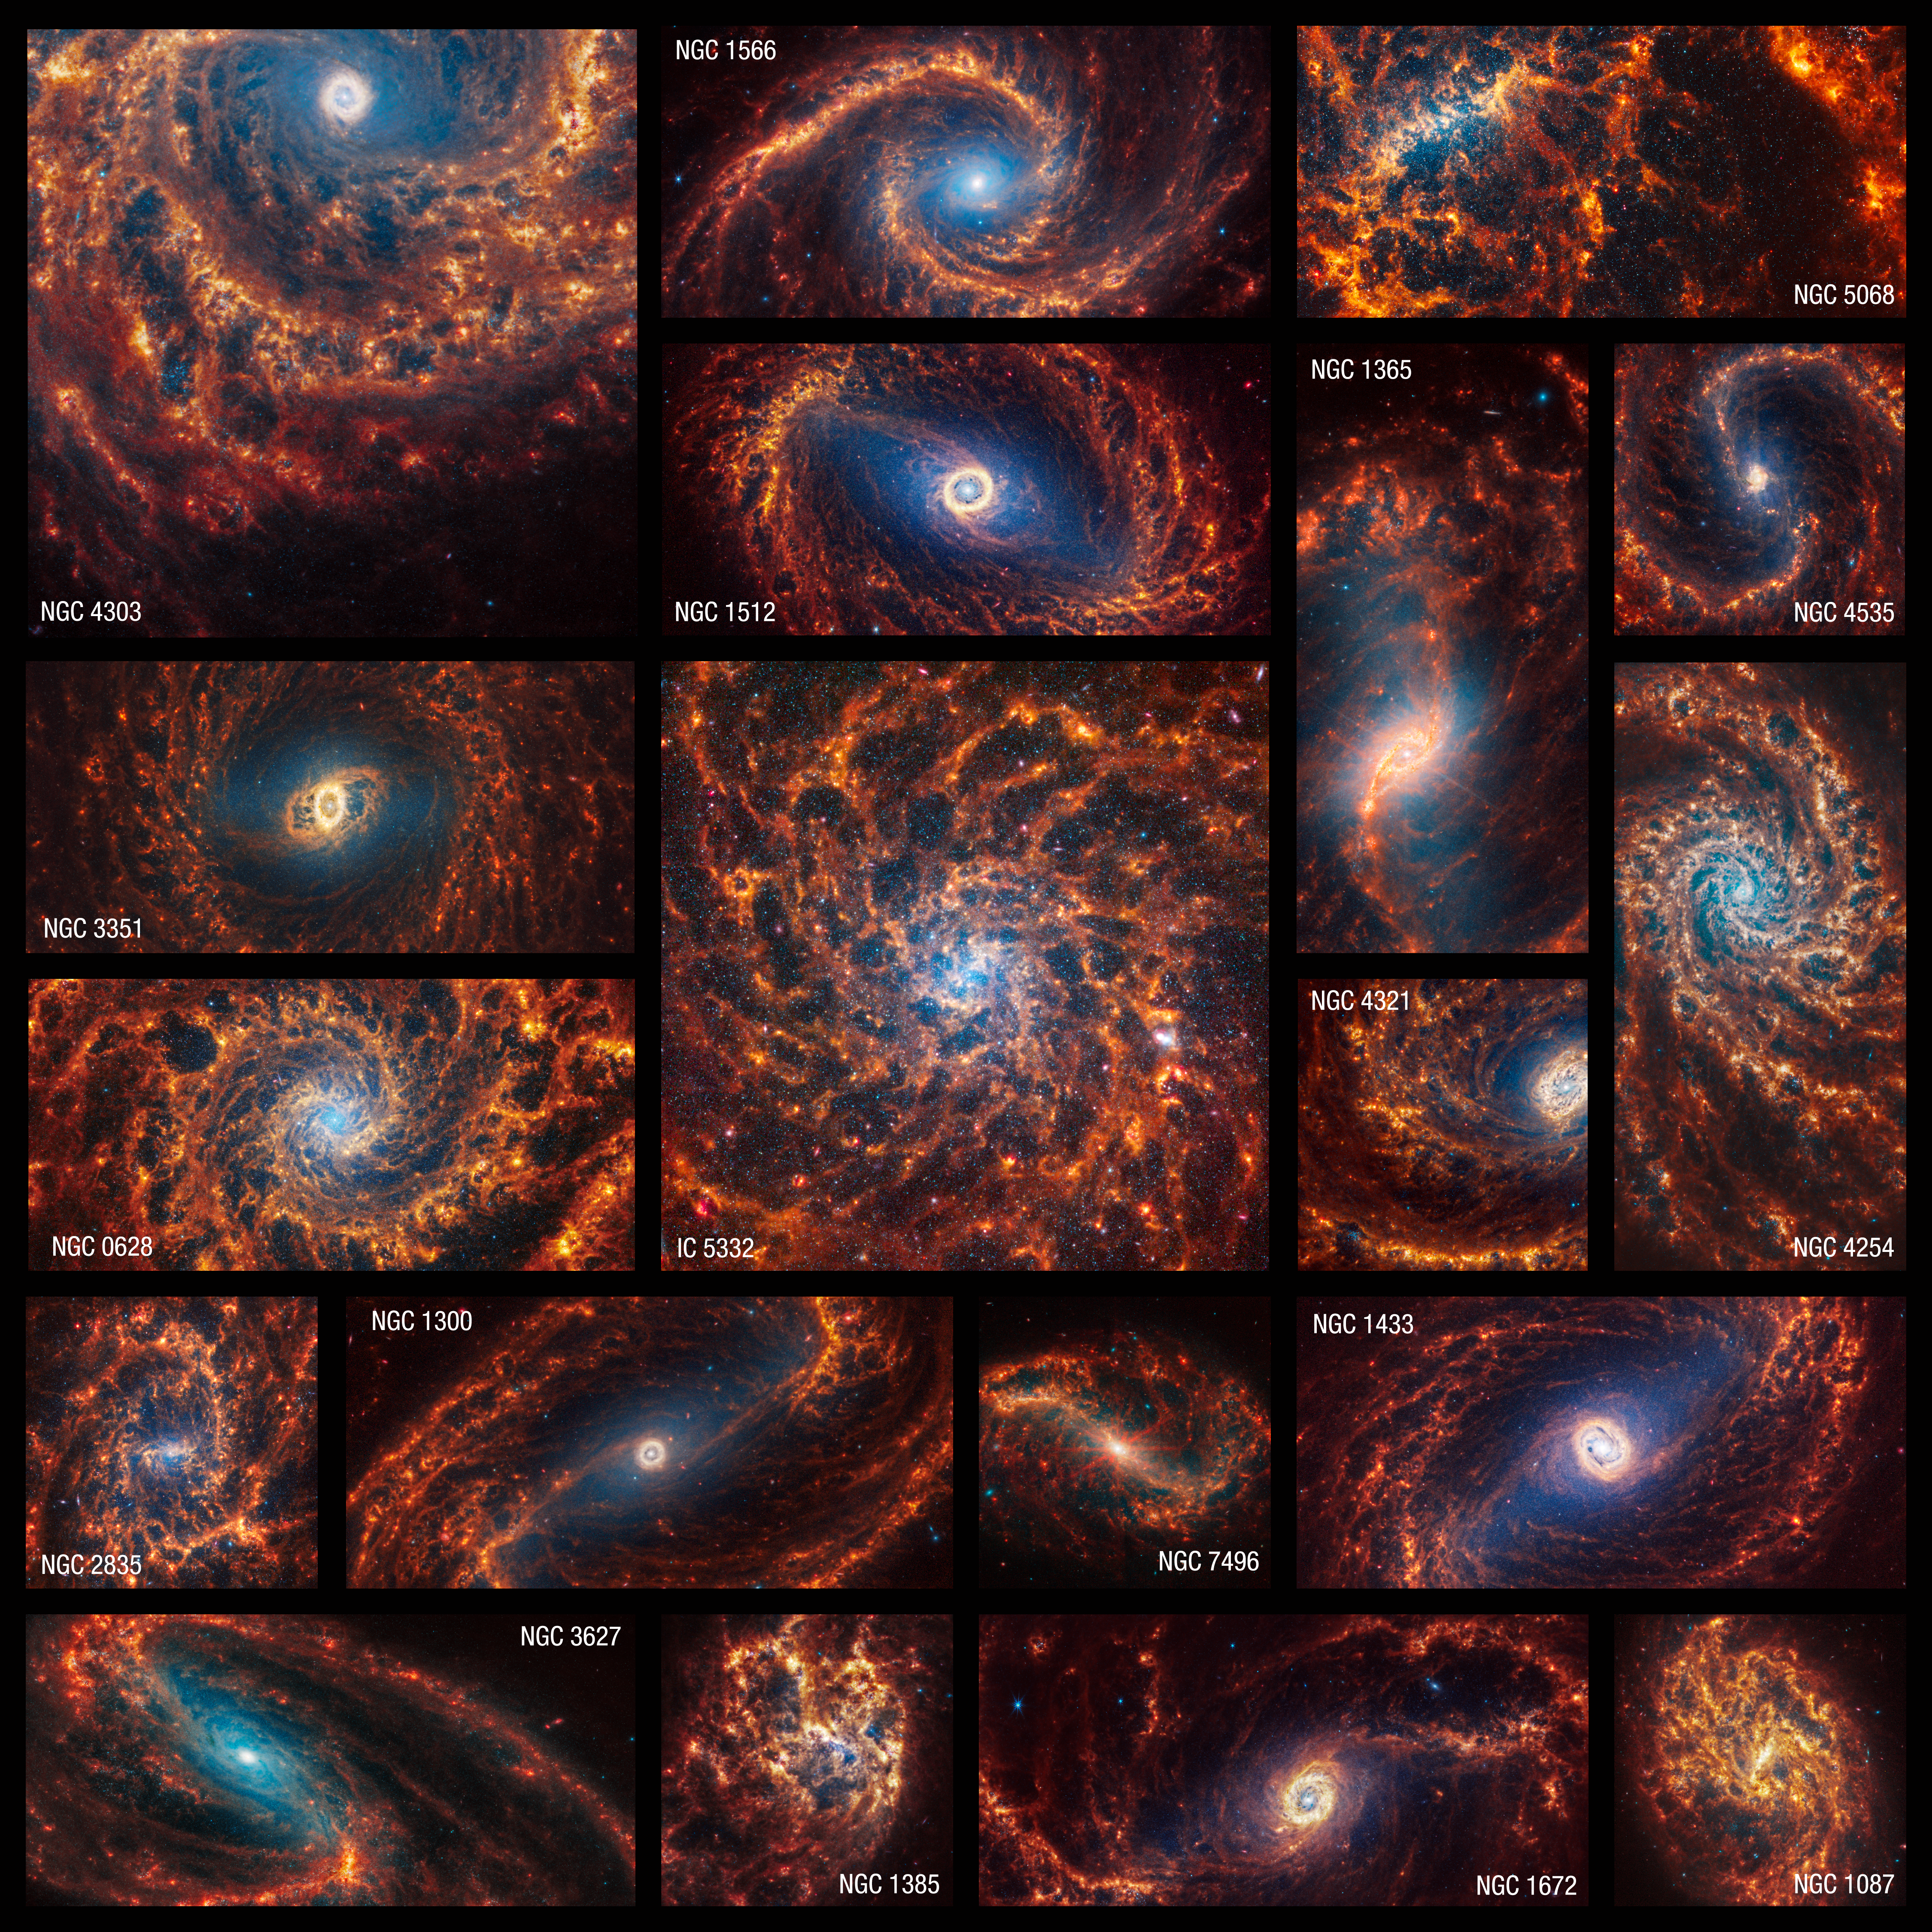

PHANGS image mosaic

This collection of 19 face-on spiral galaxies from the NASA/ESA/CSA James Webb Space Telescope in near- and mid-infrared light is at once overwhelming and awe-inspiring. Webb’s NIRCam (Near-Infrared Camera) captured millions of stars in these images. Older stars appear blue here, and are clustered at the galaxies’ cores. The telescope’s MIRI (Mid-Infrared Instrument) observations highlight glowing dust, showing where it exists around and between stars – appearing in shades of red and orange. Stars that haven’t yet fully formed and are encased in gas and dust appear bright red.

Webb’s high-resolution images are the first to show large, spherical shells in the gas and dust in such exquisite detail. These holes may have been created by stars that exploded and carved out giant regions in the interstellar material.

Another eye-catching detail? Several galaxy cores are awash in pink-and-red diffraction spikes. These are clear signs that these galaxies may have central active supermassive black holes or central star clusters.

These spiral galaxies are Webb’s first big batch of contributions to the Physics at High Angular resolution in Nearby GalaxieS (PHANGS) program, that includes existing images and data from the NASA/ESA Hubble Space Telescope, the Very Large Telescope’s Multi-Unit Spectroscopic Explorer (MUSE), and the Atacama Large Millimetre/submillimetre Array (ALMA). With Webb’s images, researchers can now examine these galaxies in ultraviolet, visible, infrared, and radio light.

Credit: NASA, ESA, CSA, STScI, J. Lee (STScI), T. Williams (Oxford), PHANGS Team, E. Wheatley (STScI)